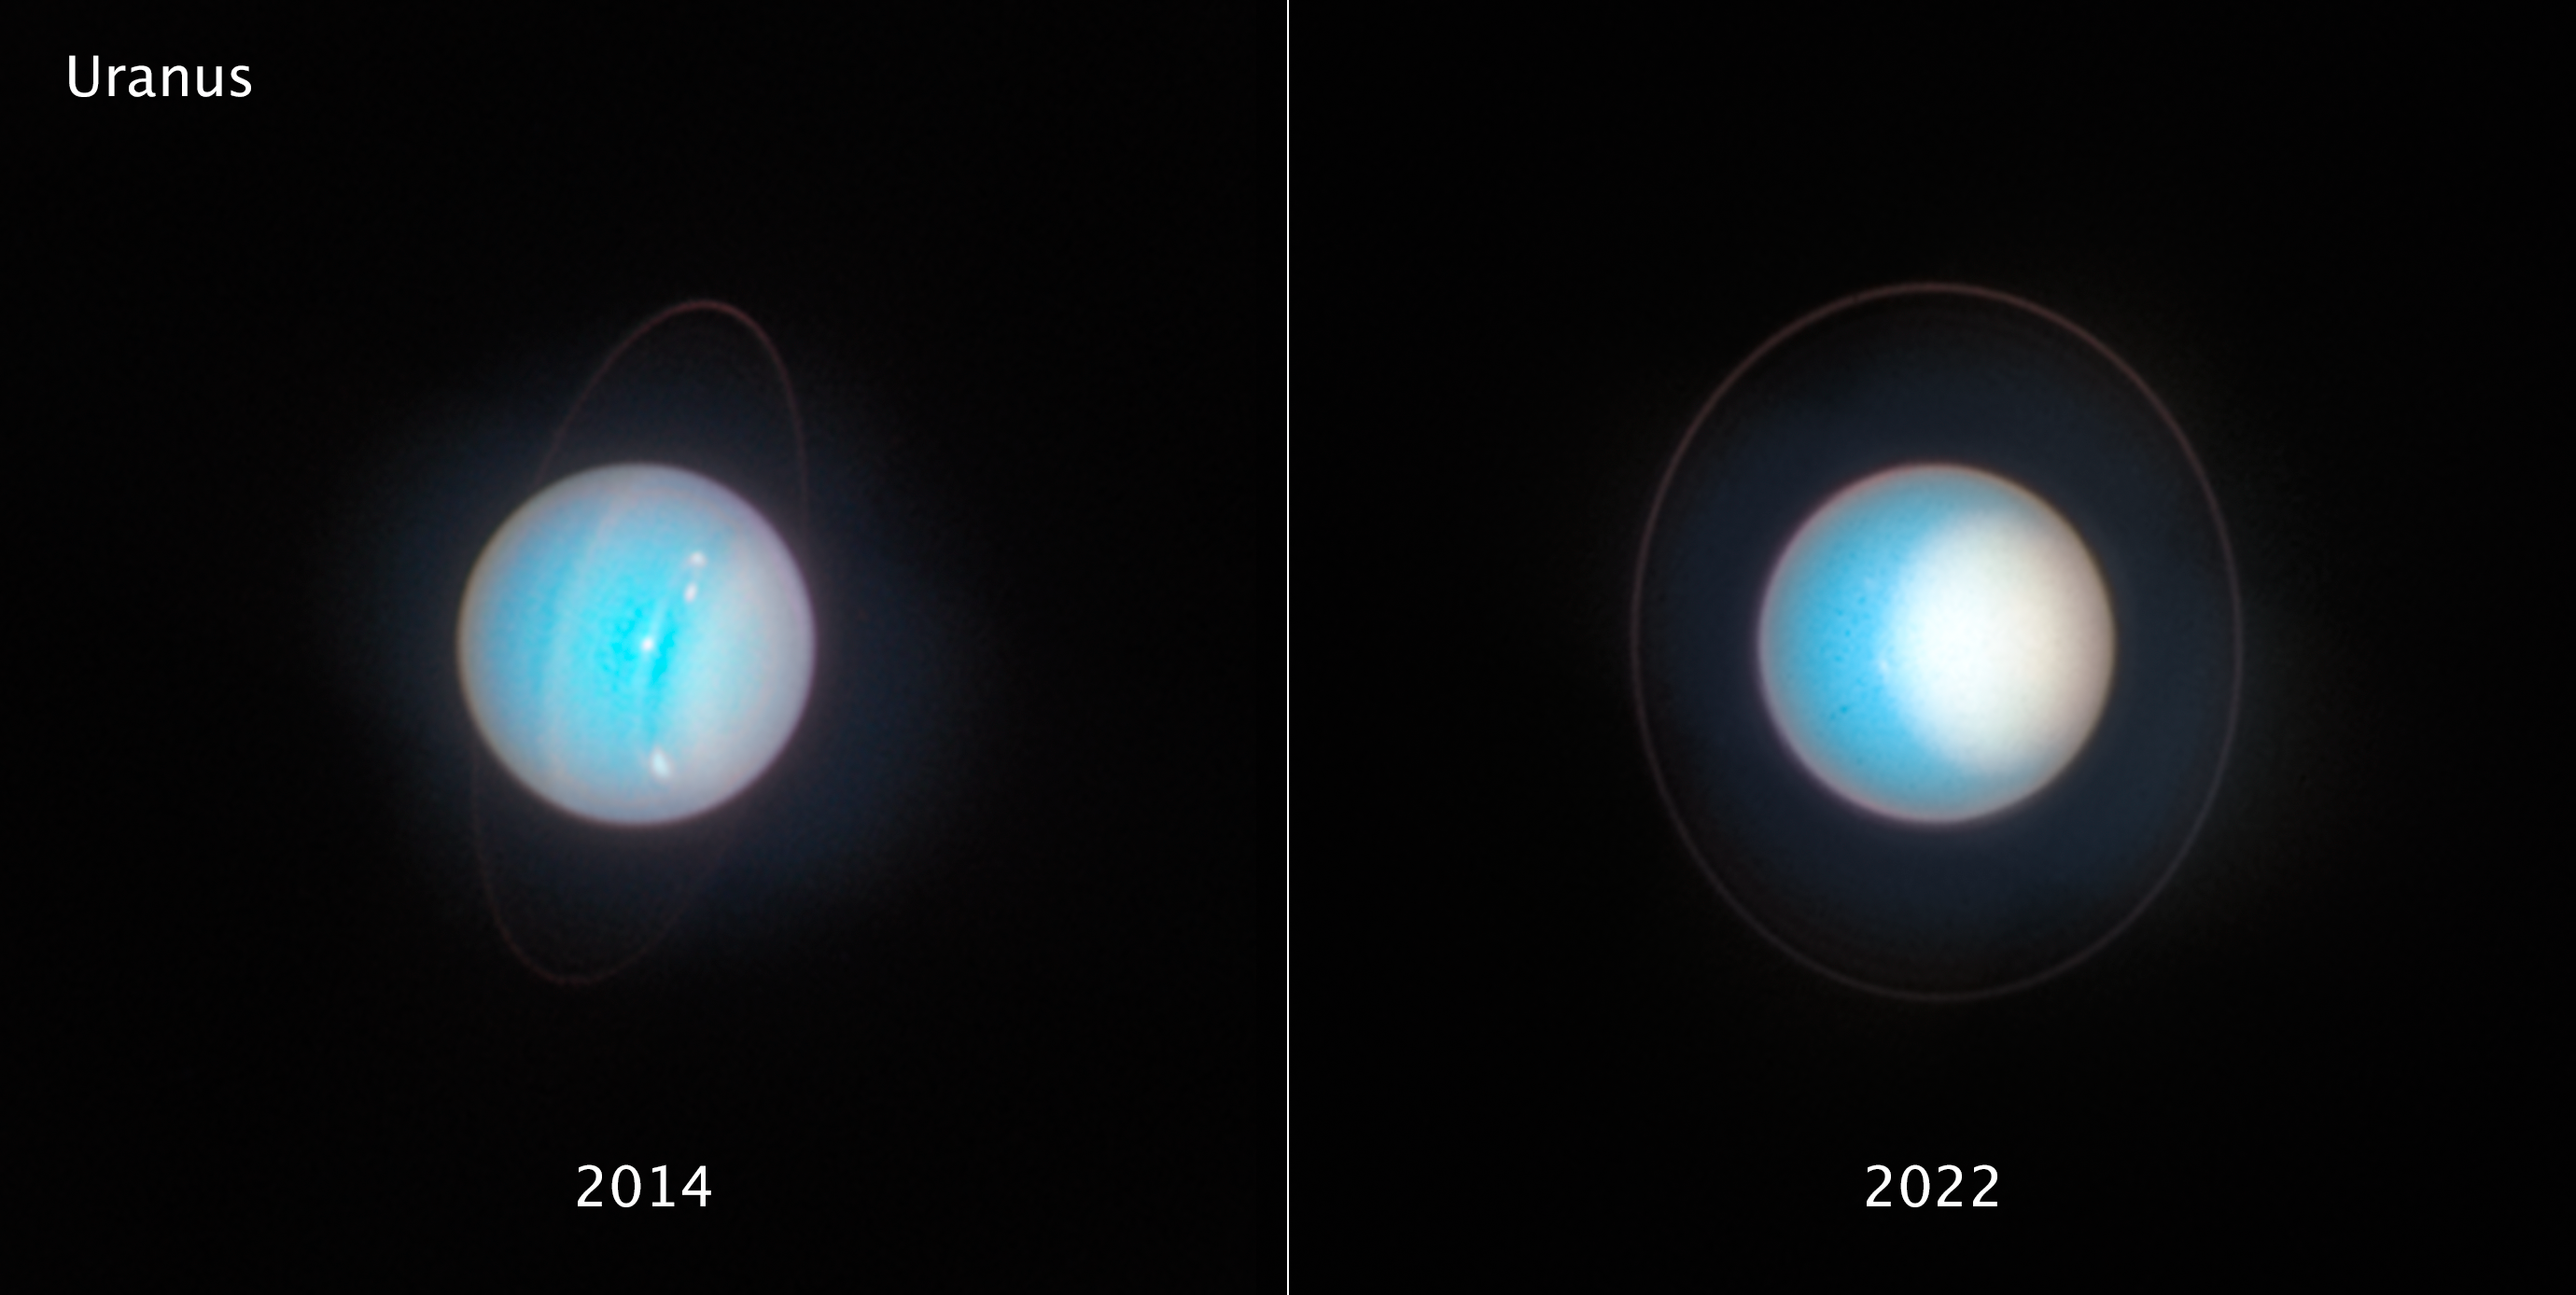

Uranus (November 2014 and November 2022)

Planetary oddball Uranus rolls around the Sun on its side as it follows its 84-year orbit, rather than spinning in a more ’vertical’ position as Earth does. Its weirdly tilted ‘horizontal’ rotation axis is angled just eight degrees off the plane of the planet’s orbit. One recent theory proposes that Uranus once had a massive moon that gravitationally destabilised it and then crashed into it. Other possibilities include giant impacts during the formation of the planets, or even giant planets exerting resonant torques on each other over time. The consequences of Uranus’s tilt are that for stretches of time lasting up to 42 years, parts of one hemisphere are completely without sunlight. When the Voyager 2 spacecraft visited during the 1980s, the planet’s south pole was pointed almost directly at the Sun. Hubble’s latest view shows the northern pole now tipping toward the Sun.

[LEFT] - This is a Hubble view of Uranus taken in 2014, seven years after the northern spring equinox when the Sun was shining directly over the planet’s equator, and shows one of the first images from the OPAL programme. Multiple storms with methane ice-crystal clouds appear at mid-northern latitudes above the planet’s cyan-tinted lower atmosphere. Hubble photographed the ring system edge-on in 2007, but the rings are seen starting to open up seven years later in this view. At this time, the planet had multiple small storms and even some faint cloud bands.

[RIGHT] - As seen in 2022, Uranus’s north pole shows a thickened photochemical haze that looks similar to the smog over cities. Several little storms can be seen near the edge of the polar haze boundary. Hubble has been tracking the size and brightness of the north polar cap and it continues to get brighter year after year. Astronomers are disentangling multiple effects — from atmospheric circulation, particle properties, and chemical processes — that control how the atmospheric polar cap changes with the seasons. At the Uranian equinox in 2007, neither pole was particularly bright. As the northern summer solstice approaches in 2028 the cap may grow brighter still, and will be aimed directly toward Earth, allowing good views of the rings and the north pole; the ring system will then appear face-on. This image was taken on 10 November 2022.

Credit: NASA, ESA, STScI, A. Simon (NASA-GSFC), M. H. Wong (UC Berkeley), J. DePasquale (STScI)